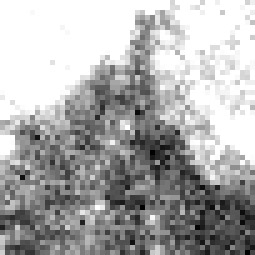

Cepheid 3 NGC 4603

Harvard Observatory astronomer Henrietta S. Leavitt makes the first crucial step in establishing the distances to nearby "spiral nebulae." Studying variable stars in the Magellanic Clouds, she discovers the presence of rhythmically pulsating stars, known as Cepheid variables, which brighten and dim over a period of days. By observing the relationship between a Cepheid's brightness and its pulsation rate, astronomers can calculate how much light it emits and then use that number to estimate its distance.

Credit: NASA & ESA